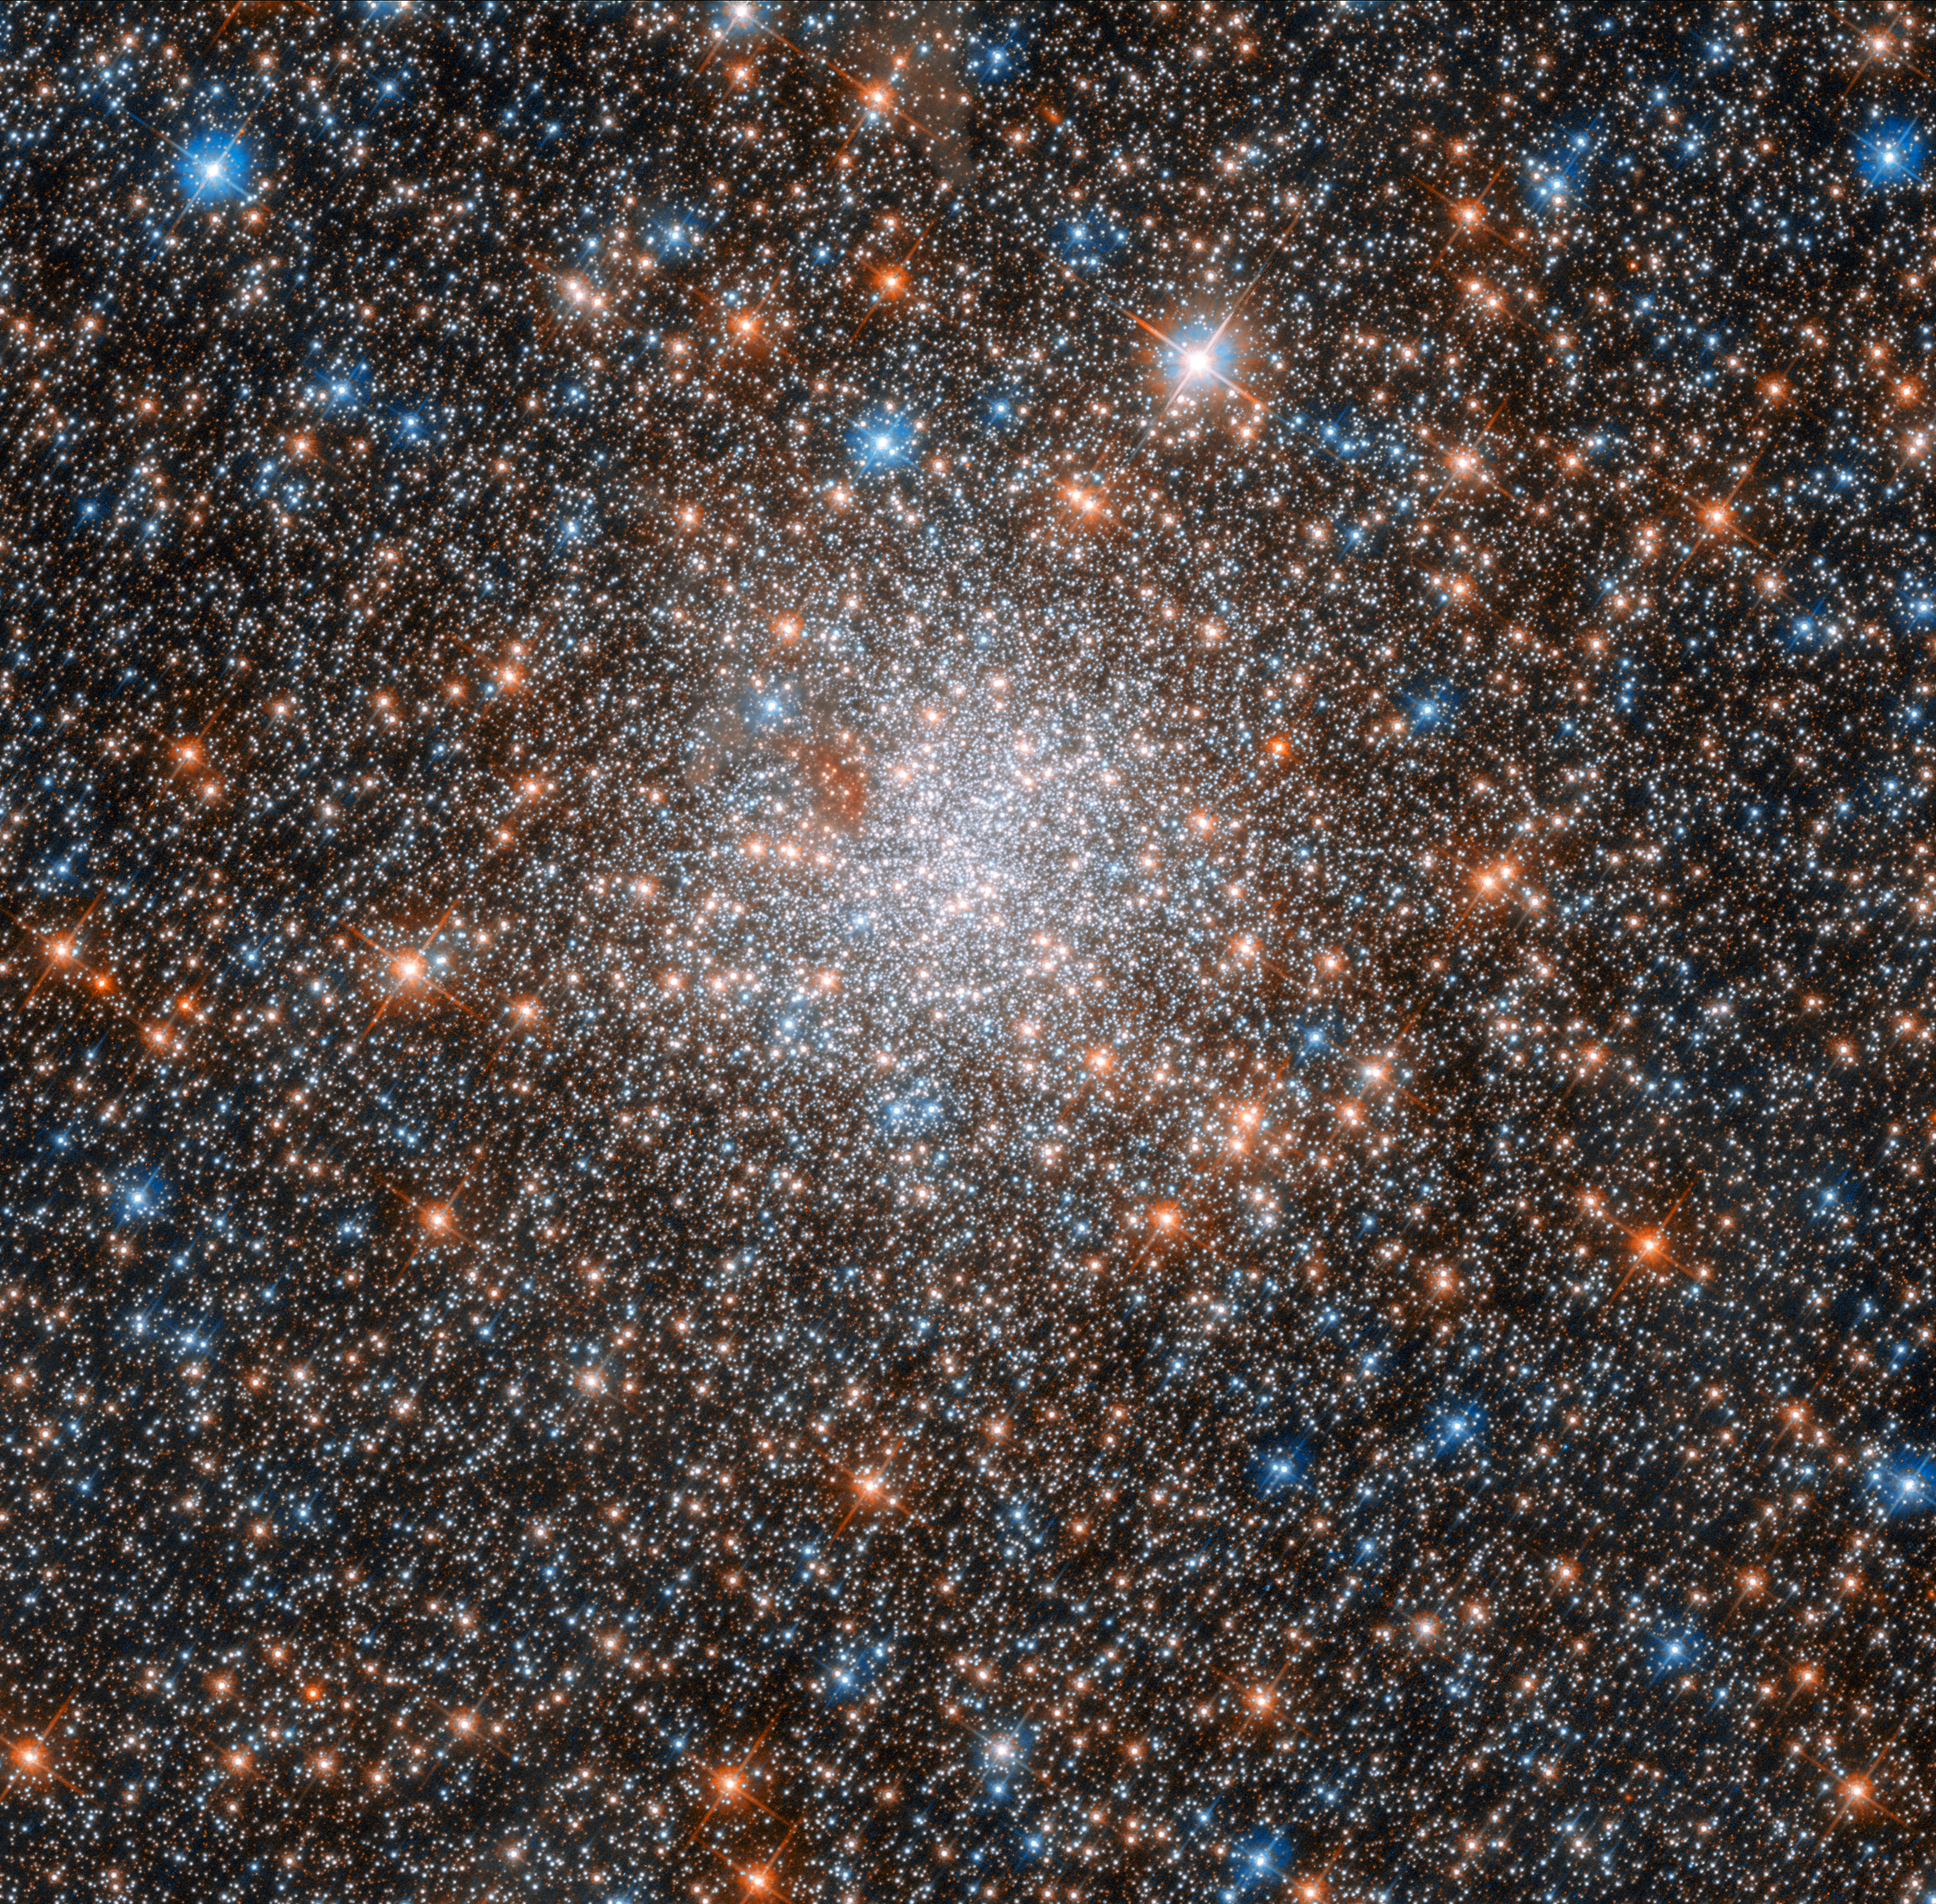

Celestial fairy lights

This glittering ball of stars is the globular cluster NGC 1898, which lies towards the centre of the Large Magellanic Cloud — one of our closest cosmic neighbours. The Large Magellanic Cloud is a dwarf galaxy that hosts an extremely rich population of star clusters, making it an ideal laboratory for investigating star formation.

Discovered in November 1834 by British astronomer John Herschel, NGC 1898 has been scrutinised numerous times by the NASA/ESA Hubble Space Telescope. Today we know that globular clusters belong to the oldest known objects in the Universe and that they are relics of the first epochs of galaxy formation. While we already have a pretty good picture on the globular clusters of the Milky Way — still with many unanswered questions — our studies on globular clusters in nearby dwarf galaxies just started. The observations of NGC 1898 will help to determine if their properties are similar to the ones found in the Milky Way, or if they have different features, due to being in a different cosmic environment.

This image was taken by Hubble’s Advanced Camera for Surveys (ACS) and Wide Field Camera 3 (WFC3). The WFC3 observes light ranging from near-infrared to near-ultraviolet wavelengths, while the ACS explores the near-infrared to the ultraviolet.

Credit: ESA/Hubble & NASA